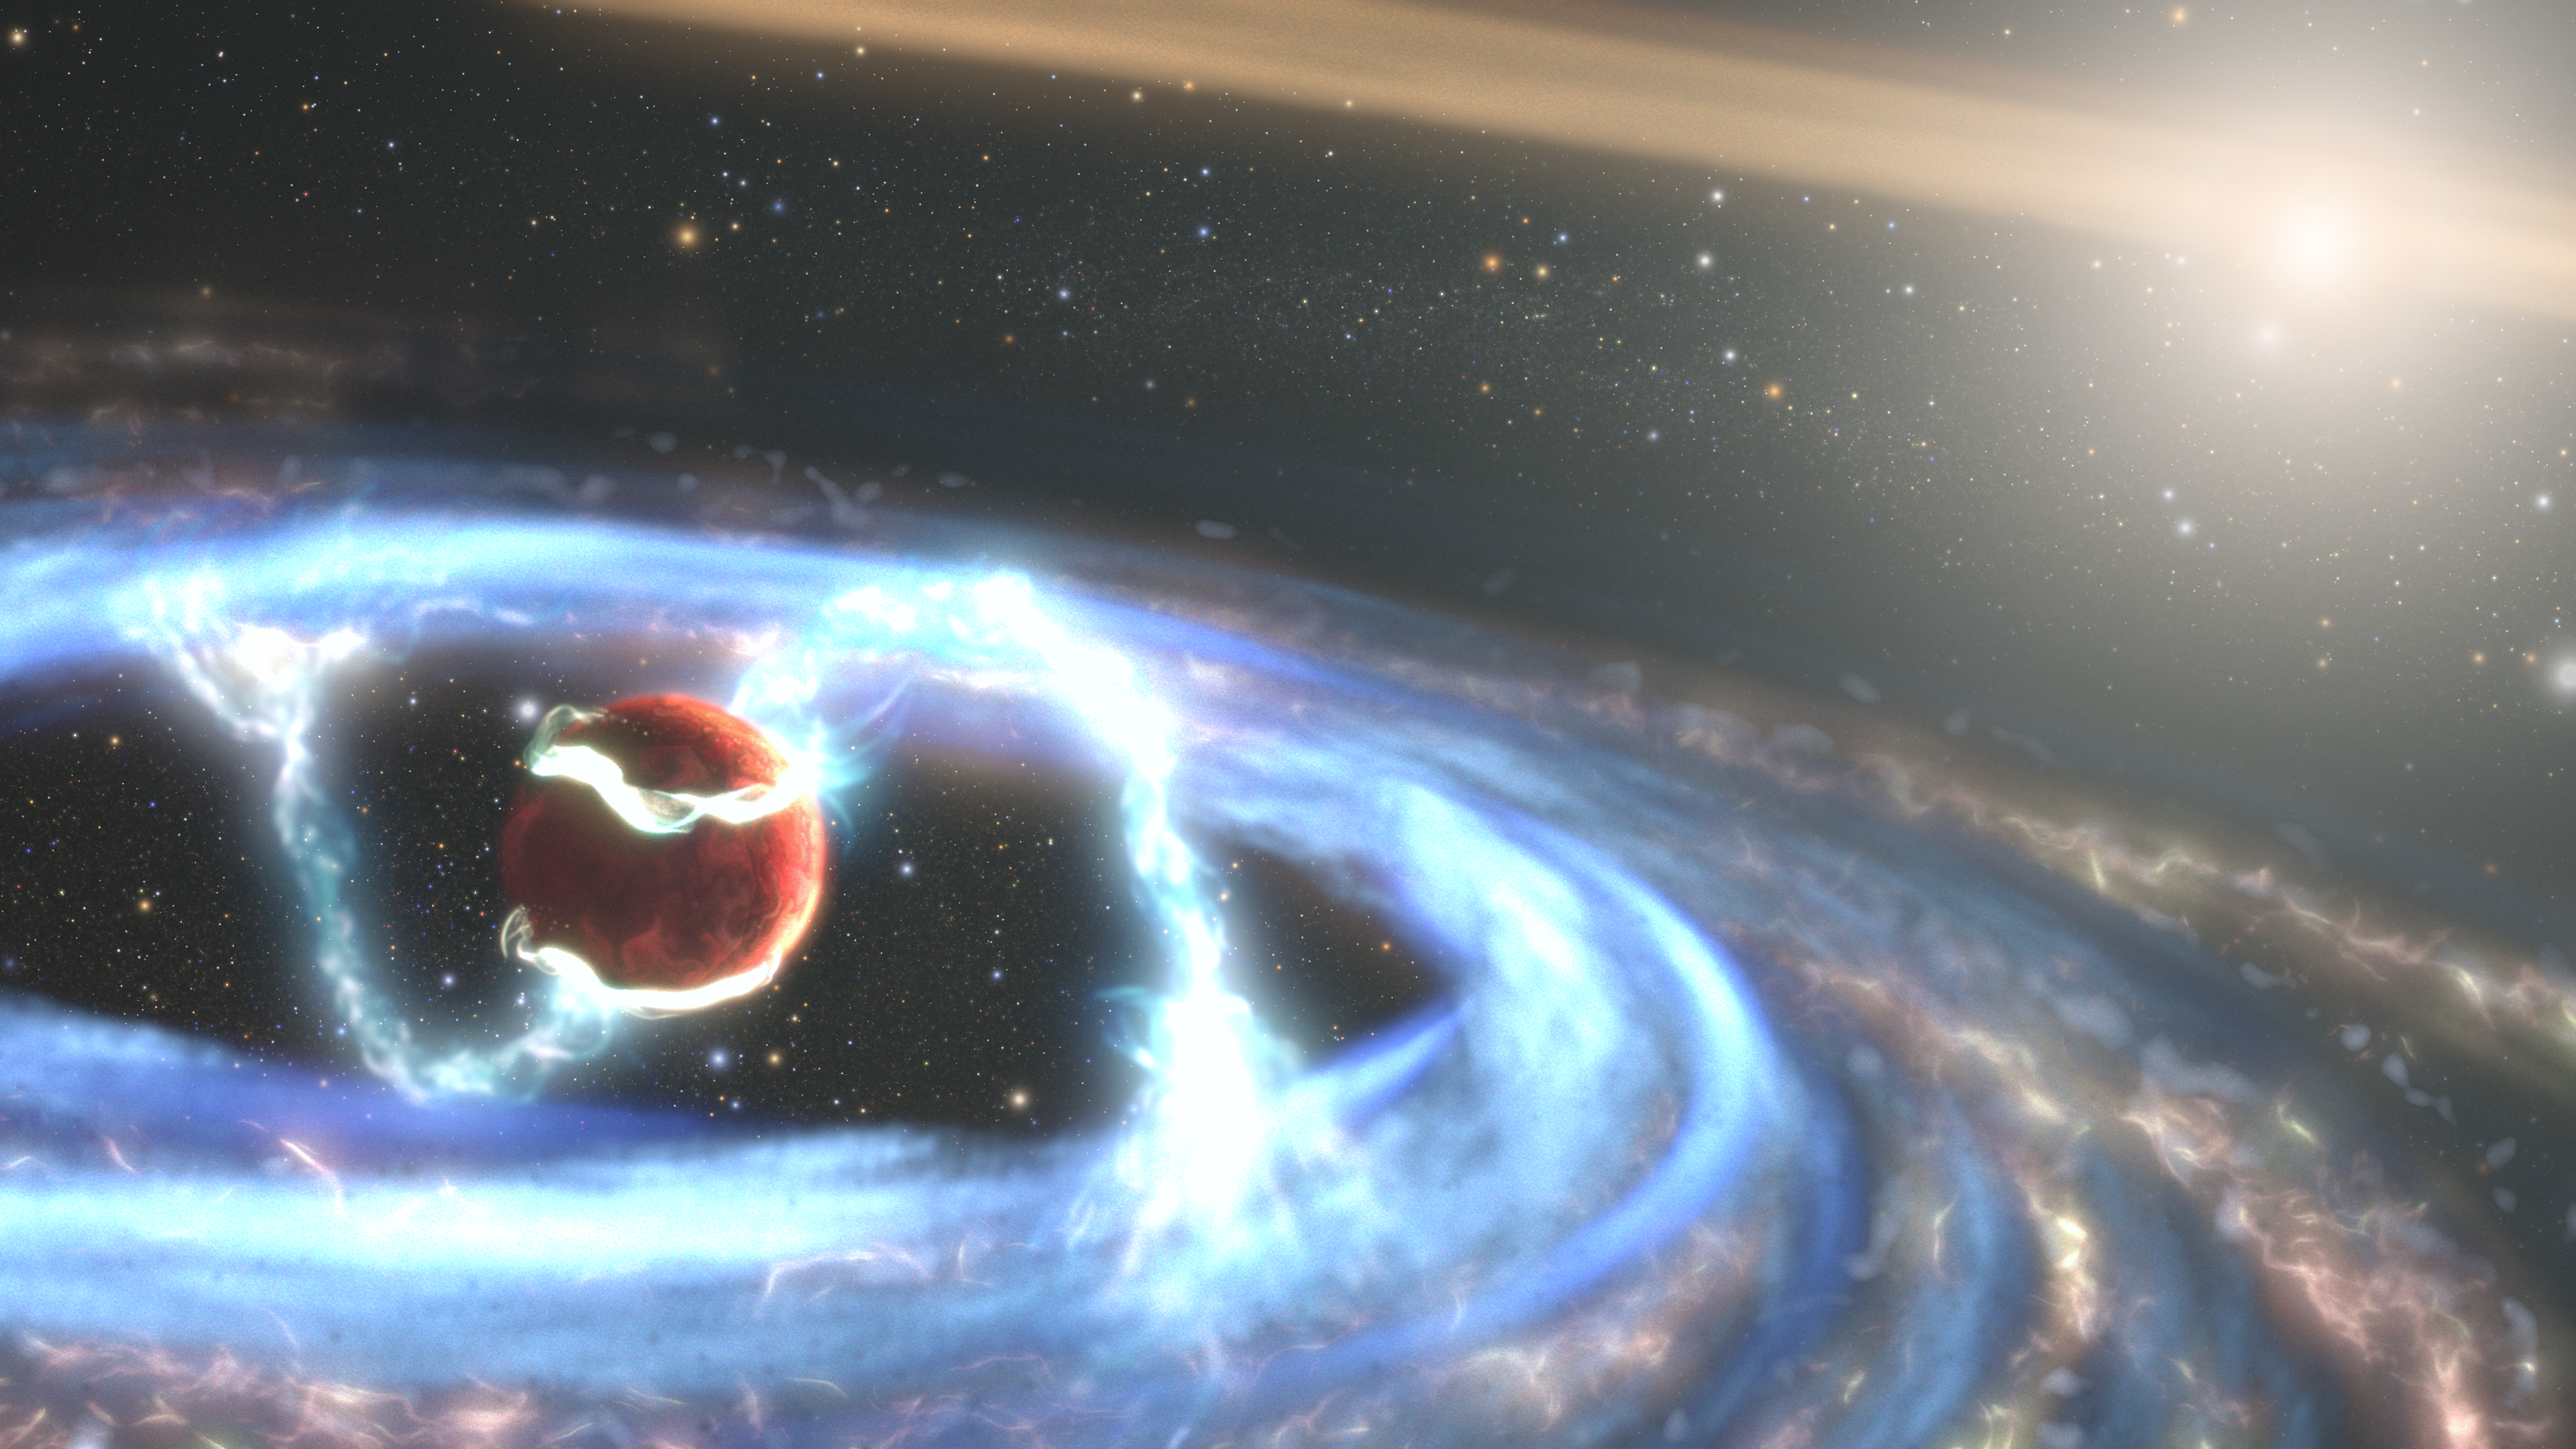

Artist’s Impression of PDS 70b

This illustration of the newly forming exoplanet PDS 70b shows how material may be falling onto the giant world as it builds up mass. By employing Hubble’s ultraviolet light (UV) sensitivity, researchers got a unique look at radiation from extremely hot gas falling onto the planet, allowing them to directly measure the planet’s mass growth rate for the first time.

The planet PDS 70b is encircled by its own gas-and-dust disk that’s siphoning material from the vastly larger circumstellar disk in this solar system. The researchers hypothesize that magnetic field lines extend from its circumplanetary disk down to the exoplanet’s atmosphere and are funneling material onto the planet’s surface. The illustration shows one possible magnetospheric accretion configuration, but the magnetic field’s detailed geometry requires future work to probe.

The remote world has already bulked up to five times the mass of Jupiter over a period of about 5 million years, but is anticipated to be in the tail end of its formation process. PDS 70b orbits the orange dwarf star PDS 70 approximately 370 light-years from Earth in the constellation Centaurus.

Credit: NASA, ESA, STScI, Joseph Olmsted (STScI)